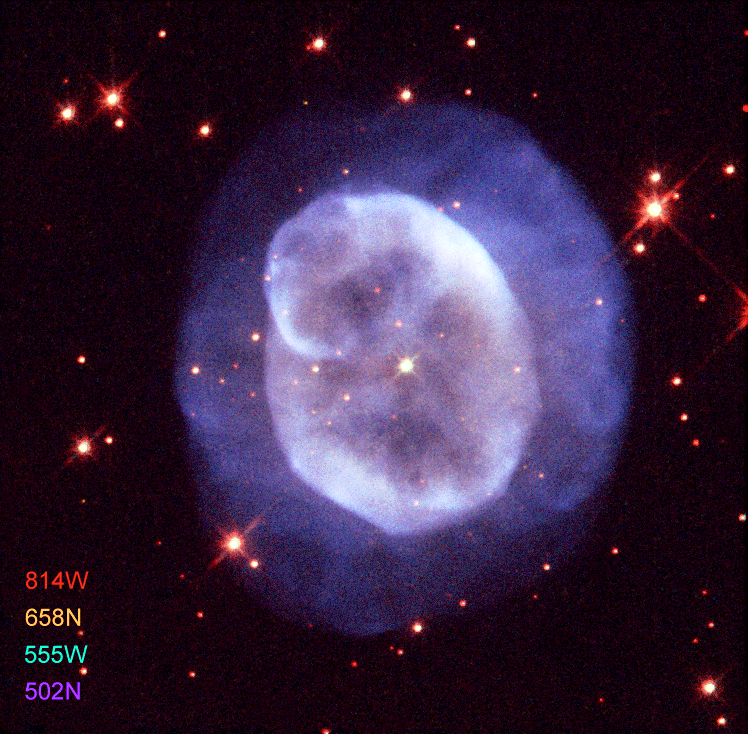

The planetary nebula NGC 5979

This previously unreleased colour image of the planetary nebula NGC 5979 is a composite of raw FITS files made with the ESA/ESO/NASA Photoshop FITS Liberator. The image was composed from four individual exposures taken through: A blue narrow-band filter (502 nm, 460 seconds showing the forbidden OIII line), A green wide-band filter (555 nm, 240 seconds), An orange-red narrow-band filter (658 nm, 1200 seconds showing the forbidden NII line), A red, or near-infrared, wide-band filter (814 nm, 480 seconds).

Stars like the Sun spend most of their life quietly converting hydrogen into helium. However when the hydrogen in the stellar core is exhausted, they start a short phase of much more rapid evolution, growing in size and brightness, to become cooler red giants that begin to eject large amounts of gas and dust as a slow stellar wind.

When the star has lost most of its mass, it heats up again and brightens so that the ejected material begins to glow. At the same time a faster wind sweeps through to clear out the cocoon of obscuring material and so a planetary nebula is born.

Credit: ESA, ESO and NASA